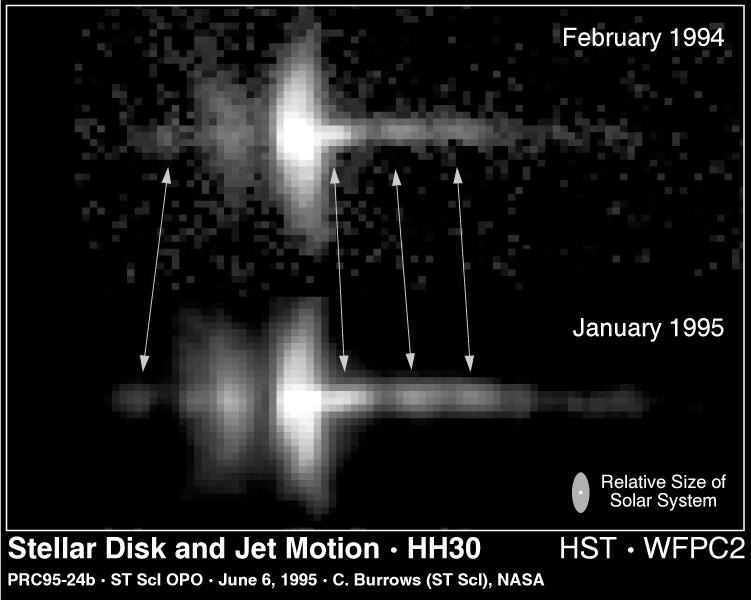

HH-30 - stellar disc and jet motion

This Hubble Space Telescope image reveals unprecedented detail in a newly forming star called HH-30. Exposures taken a year apart show the motion of high speed blobs of gas (arrows) that are being ejected from the star at a half-million miles per hour (about 800 thousand kilometres per hour).

Credit: C. Burrows (STScI & ESA), the WFPC 2 Investigation Definition Team, NASA, K. Stapelfeldt (JPL), A Watson (LowellObservatory)